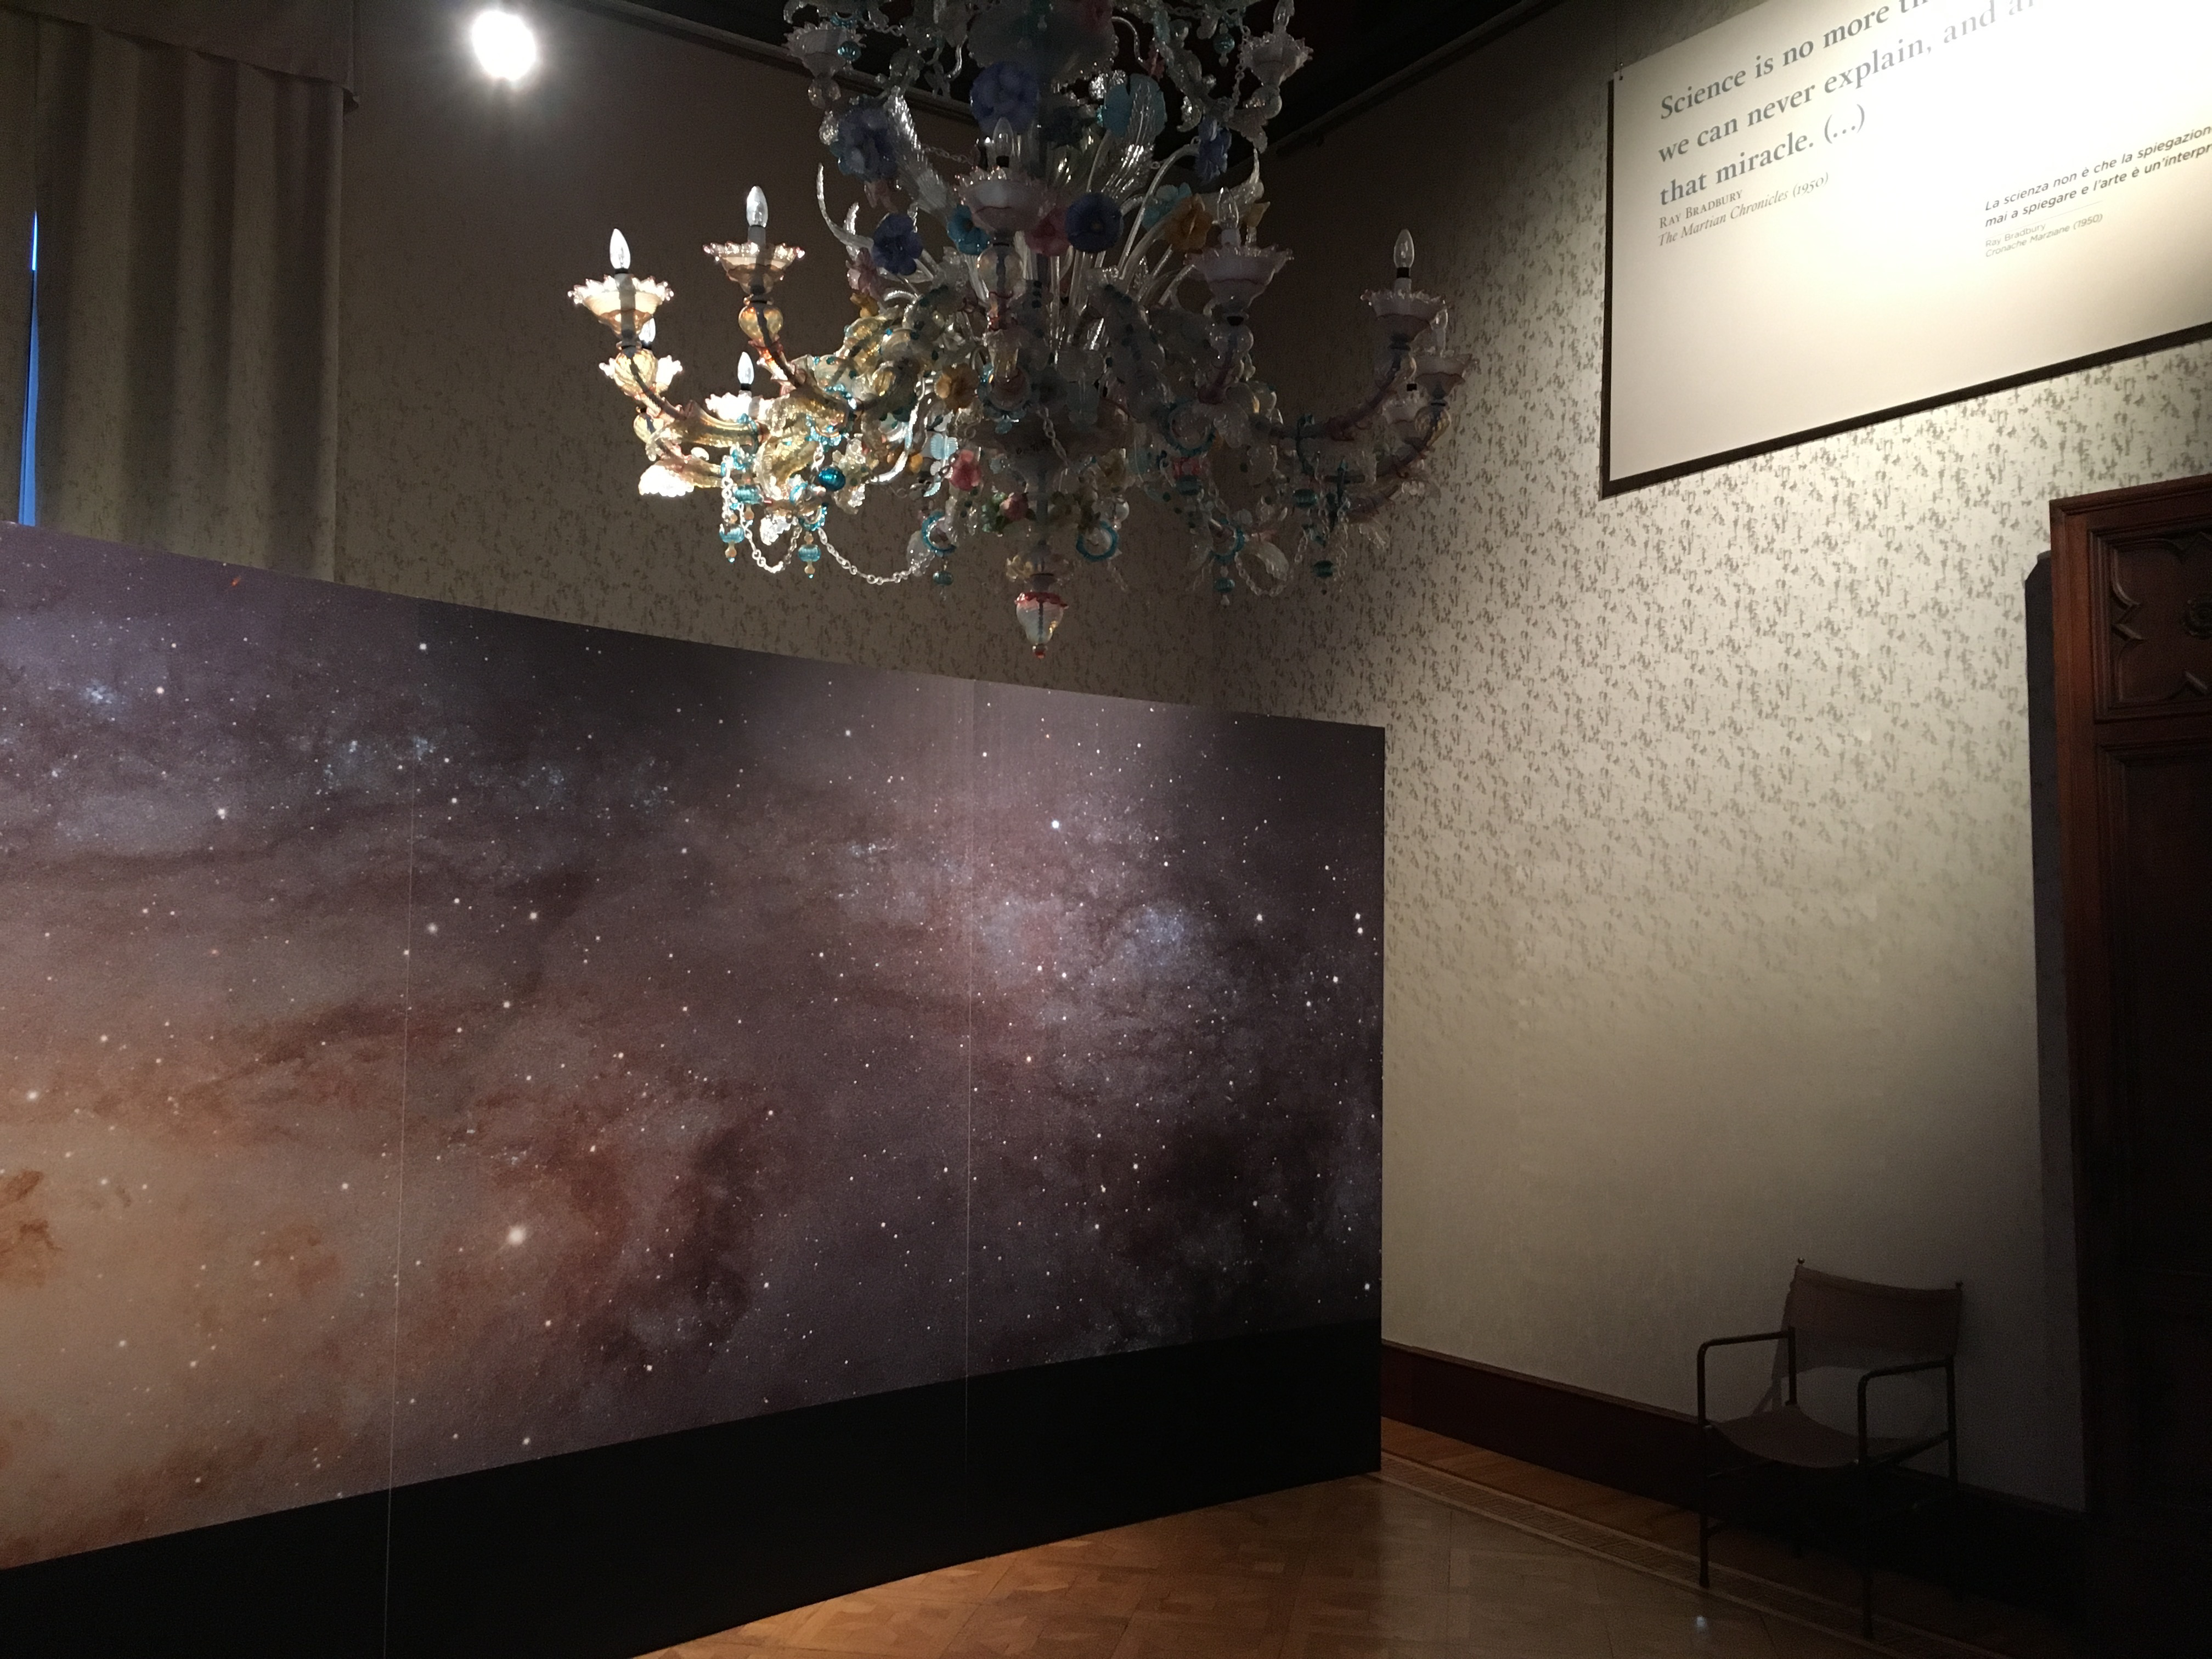

Galactic neighbour right next door

One room in the Hubble travelling exhibition Our Place in Space is focussing on our galactic neighbour, the Andromeda Galaxy. The same room also features a painting by Mario Vespasiani, whose poetic expression revolves around the celestial. In an almost pointillist style, he paints an outer space teeming with swirling stars.

Credit: ESA/Hubble, P. Jeffries